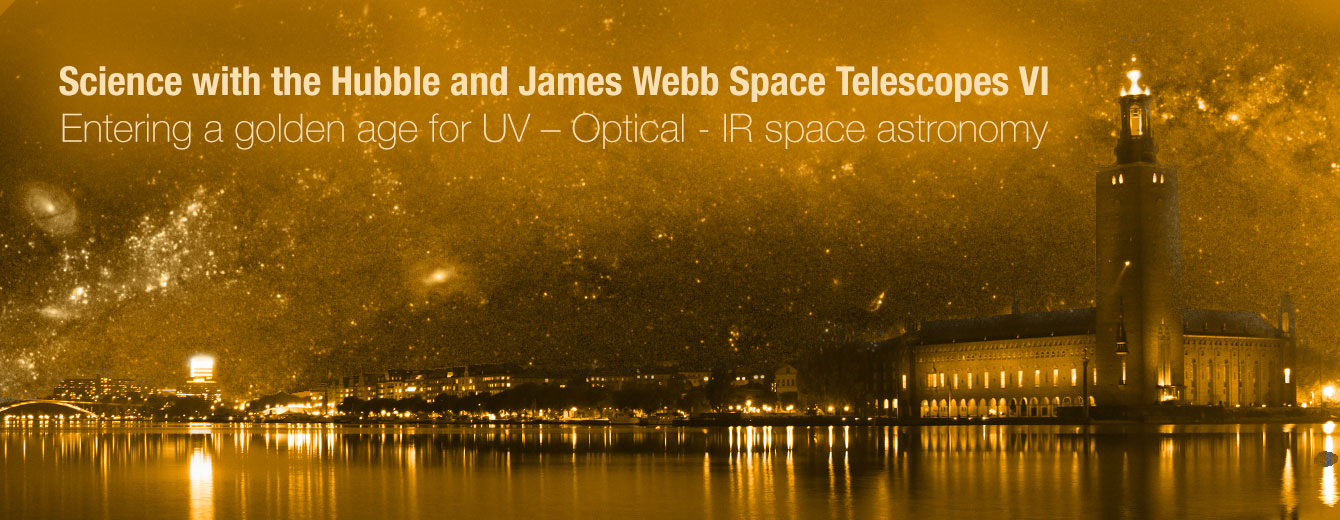

Event banner for the 2022 event “Science with the Hubble and James Webb Space Telescopes VI. Entering a golden age for UV-Optical -IR space astronomy”.

Event banner for the 2022 event “Science with the Hubble and James Webb Space Telescopes VI. Entering a golden age for UV-Optical -IR space astronomy”.

Credit: ESA/Hubble